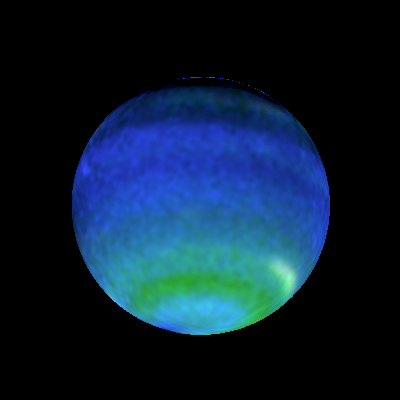

Opposite Hemispheres of Neptune

These views of Neptune, as seen through the Hubble Space Telescope, are helping planetary scientists gain some insight into the weird and wild weather that is a hallmark of the eighth planet from the sun. On Neptune, winds blow at 900 miles per hour (about 1450 kilometres per hour) and huge storms -- some the size of Earth itself -- come and go with regularity. How, precisely, Neptune's weather is driven is a mystery since the sun, which drives the Earth's weather, is 900 times dimmer there than on Earth. The bottom images show Neptune's Hubble portrait circa 1996. The top images were taken this year and help illustrate the dynamic weather features that dominate the planet.

Credit: Lawrence A. Sromovsky (University of Wisconsin-Madison) and NASA/ESA